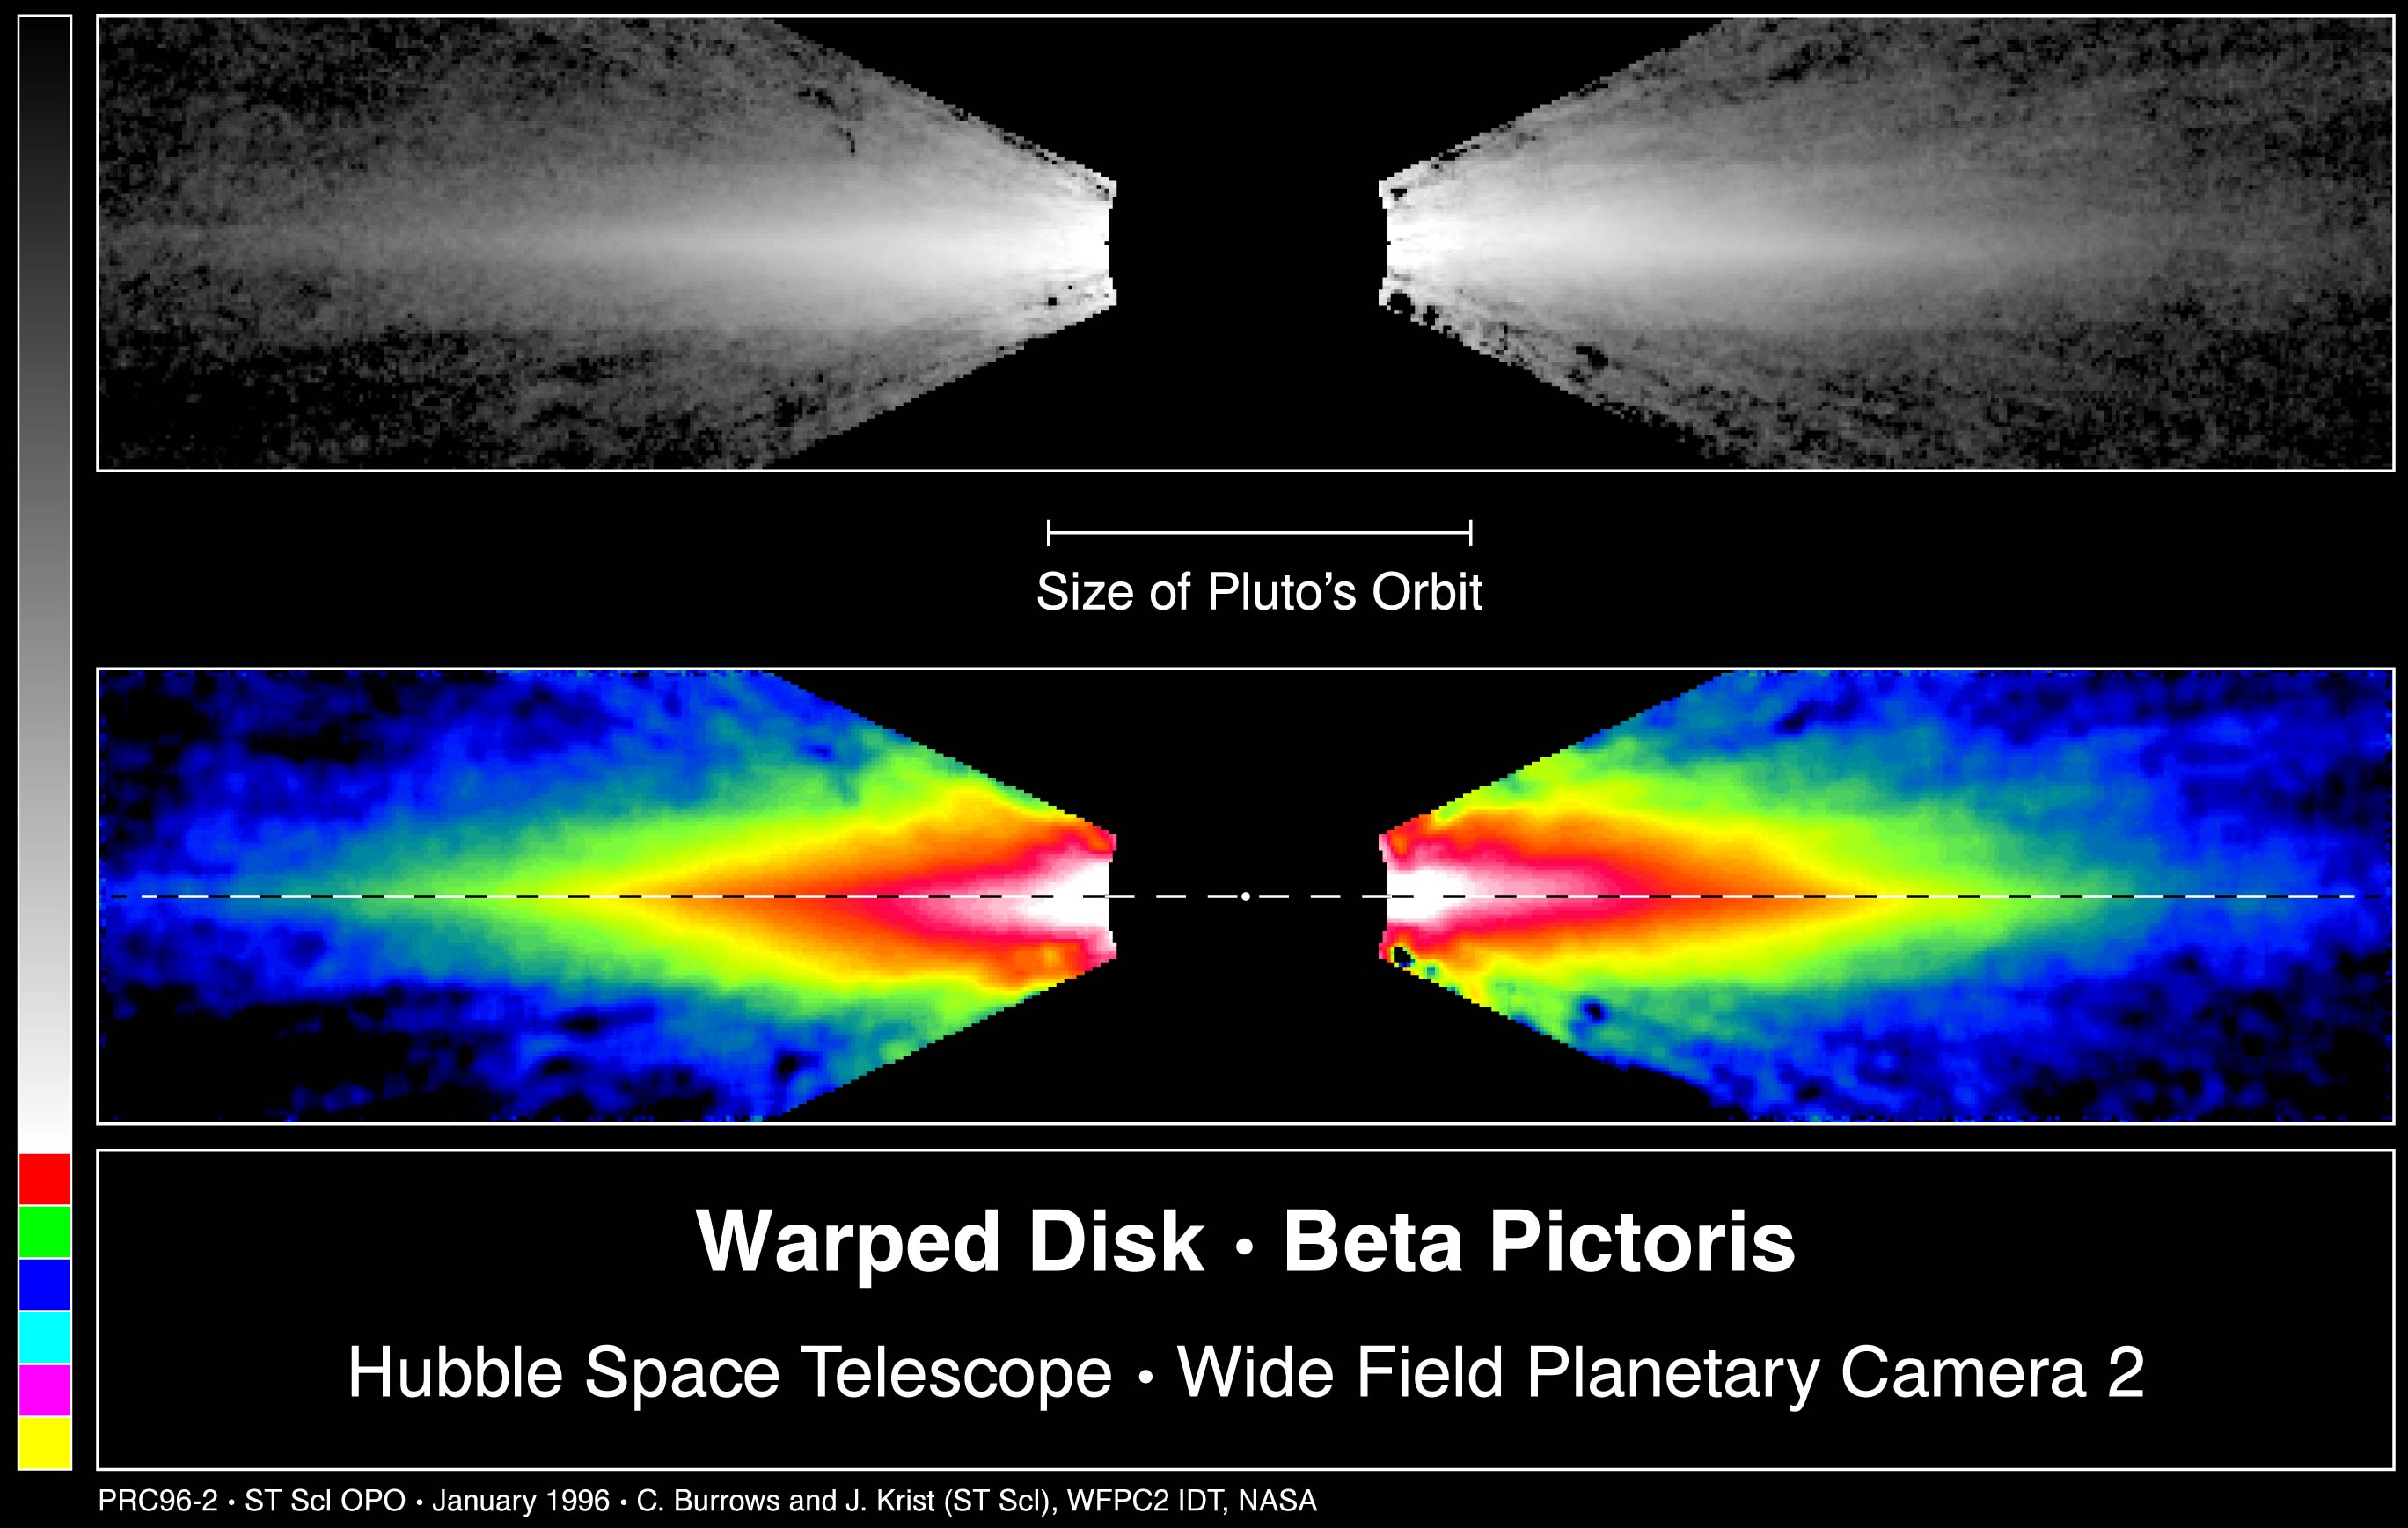

Warped Disc around Beta Pictoris

This image from the Hubble Space Telescope shows for the first time the inner region of a 200-billion mile diameter dust disk around the star Beta Pictoris.

Top Image

This is a visible light image of the disk, which appears spindle-like because it is tilted nearly edge-on to our view.

The disk is made up of microscopic dust grains of ices and silicate particles, and shines by reflected light from the star.

Bottom Image

False-color is applied through image processing to accentuate details in the disk structure.

Hubble reveals that the pink-white inner edge of the disk is slightly tilted from the plane of the outer disk (red-yellow-green) as identified by a dotted line.

A simple explanation is that a large planet is pulling on the disk. It is not possible to see the planet directly because it is close to the star, and perhaps a billion-times fainter.

Credit: Chris Burrows, Space Telescope Science Institute (STScI) the European Space Agency (ESA), J. Krist (STScI), the WFPC2 IDT team, and NASA